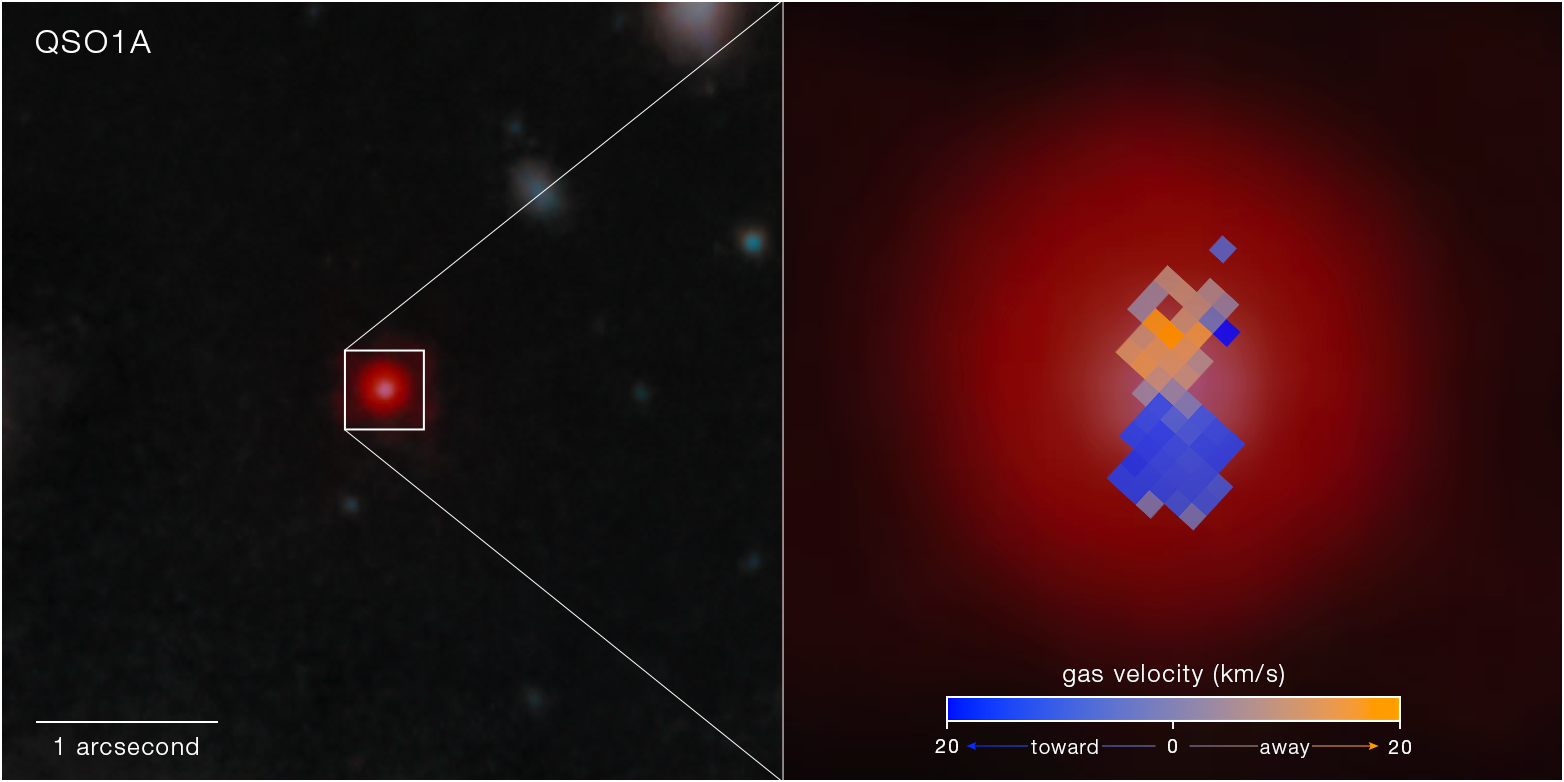

Little Red Dot Abell2744-QSO1a (NIRCam image with NIRSpec IFU velocity map)

An image detail from Webb’s NIRCam shows the Little Red Dot Abell2744-QSO1, gravitationally lensed by Abell 2744, an enormous mega-cluster of galaxies also known as Pandora’s Cluster.

Pulled out to the right is a map showing the speed that gas is moving toward or away from the telescope (rotational velocity) in different parts of QSO1. The map was made with data collected using NIRSpec’s integral field unit (IFU), a combination of camera and spectrograph. The IFU gathers an image along with 900 spectra from a square patch of sky 3 arcseconds by 3 arcseconds, creating maps showing differences in brightness of thousands of wavelengths between 0.6-micron and 5.3-micron light across the object. The gas velocity is calculated based on Doppler shift: the colours are shifted slightly toward shorter (bluer) wavelengths where material is moving toward us, and longer (redder) wavelengths where it is moving away.

The Webb data shows that the glowing gas has Keplerian rotation: it is orbiting a central point in the same way that planets orbit a star. This means that most of the mass of QSO1 must reside in a single point in the centre, i.e., a black hole. Because the velocity of the orbiting gas follows very simple laws of gravity, the data can then be used to calculate the mass of the black hole: It appears to be 50 million solar masses, or 50 million times the mass of our Sun. This is about two-thirds of the entire mass of QSO1.

Credit: NASA, ESA, CSA, L. Furtak (Ben-Gurion University), R. Maiolino (Cambridge), F. D'Eugenio (Cambridge), I. Juodžbalis (Cambridge), H. Übler (MPE), C. Marconcini (University of Florence). Image processing: A. Pagan